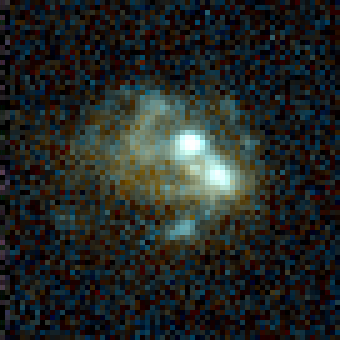

Galaxy Cluster MS1054-03

Exciting Hubble Space Telescope images of more than a dozen very distant colliding galaxies indicate that, at least in some cases, big massive galaxies form through collisions between smaller ones, in a 'generation after generation' never-ending story.

Credit: ESA/NASA, Pieter van Dokkum (University of Groningen/Leiden), Marijn Franx (University of Groningen/Leiden)